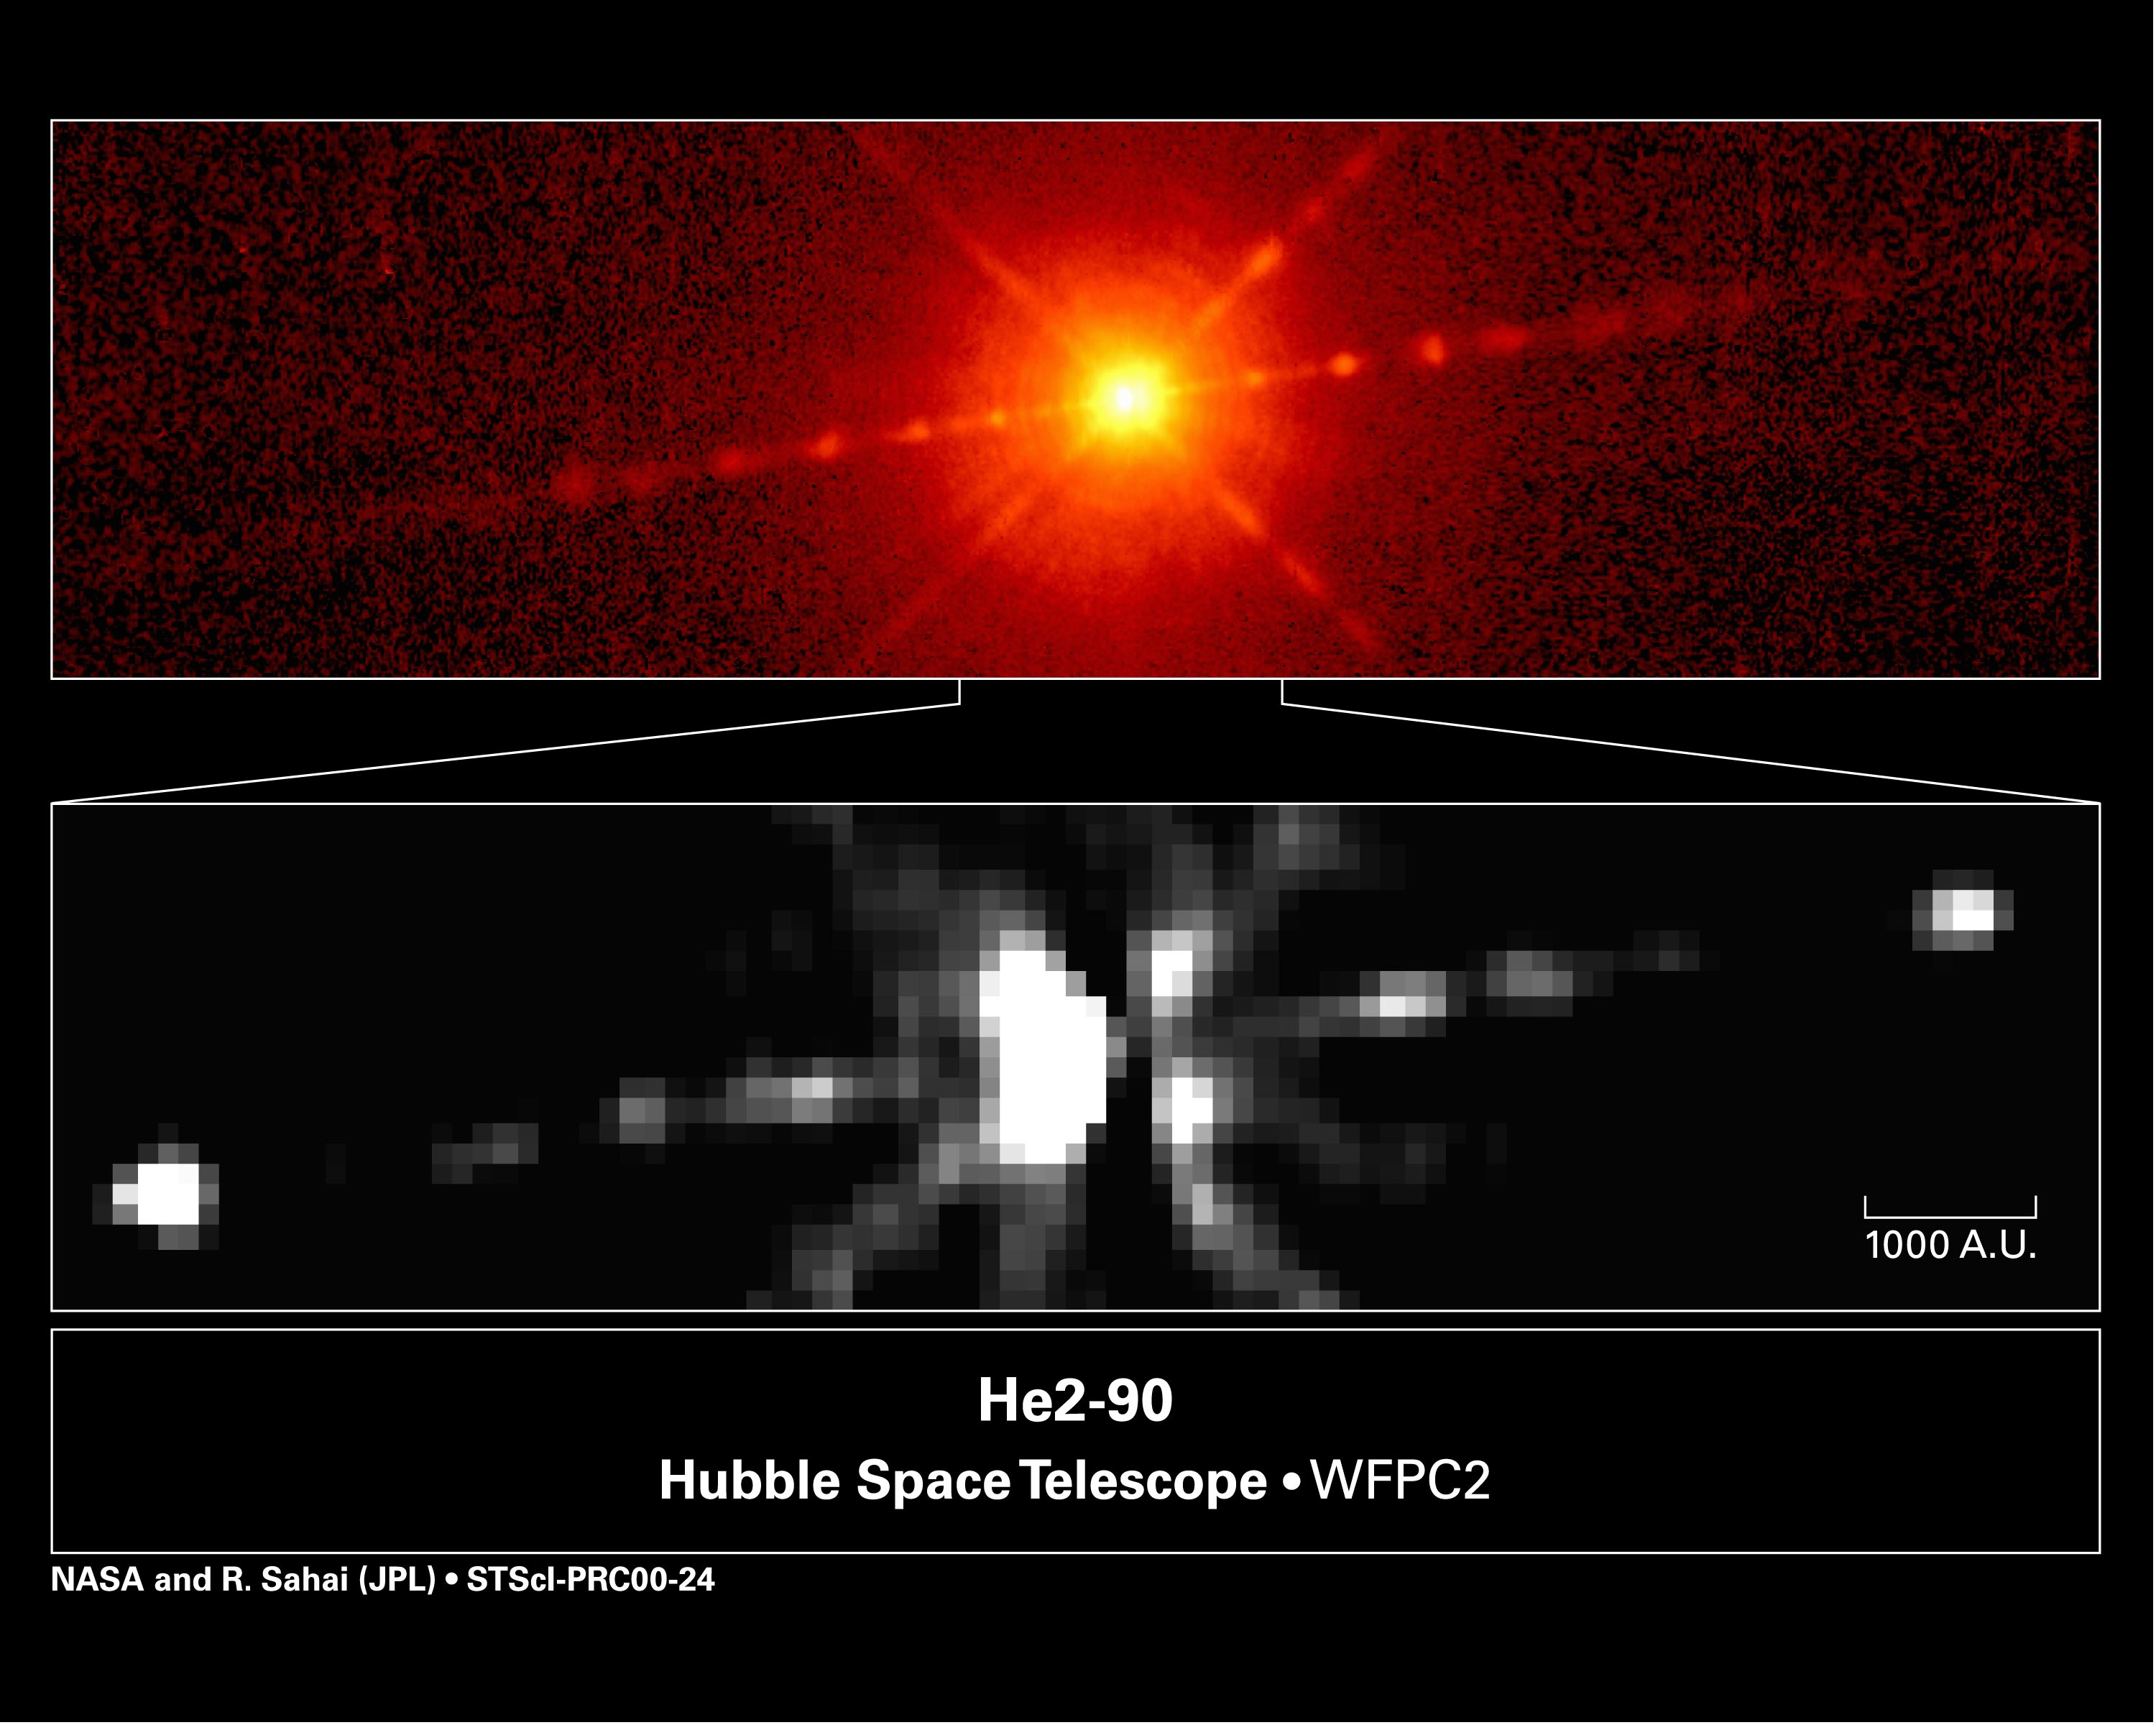

He2-90

Astronomers using NASA/ESA Hubble Space Telescope have stumbled upon a mysterious object that is grudgingly yielding clues to its identity. A quick glance at the Hubble picture at top shows that this celestial body, called He2-90, looks like a young, dust-enshrouded star with narrow jets of material streaming from each side. But it's not. The object is classified as a planetary nebula, the glowing remains of a dying, lightweight star. But the Hubble observations suggest that it may not fit that classification, either.

Credit: NASA/ESA, Raghvendra Sahai (NASA/ESA Jet Propulsion Laboratory), Lars-Ake Nyman (European Southern Observatory, Chile & Onsala Space Observatory, Sweden).